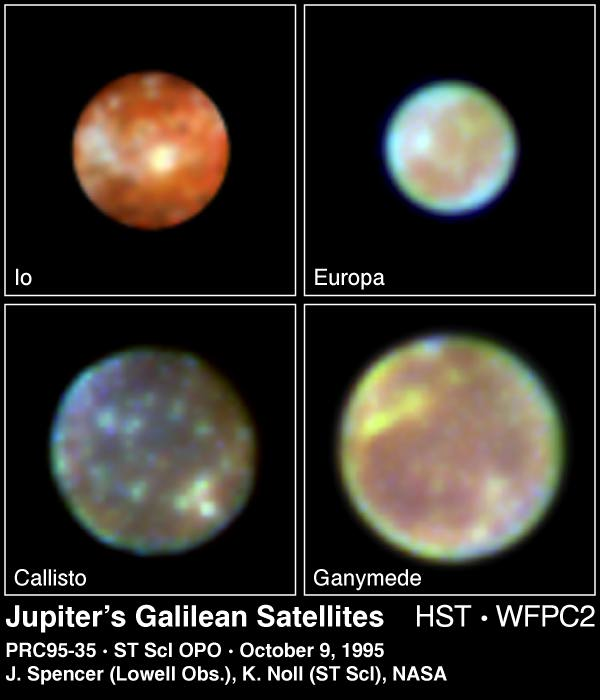

Jupiter's Galilean Satellites

This is a Hubble Space Telescope 'family portrait' of the four largest moons of Jupiter, first observed by the Italian scientist Galileo Galilei nearly four centuries ago.

Located approximately one-half billion miles away (about 805 thousand kilometres), the moons are so small that, in visible light, they appear as fuzzy disks in the largest ground-based telescopes. Hubble can resolve surface details seen previously only by the Voyager spacecraft in the early 1980s.

Credit: K. Noll (STScI), J. Spencer (Lowell Observatory), and NASA/ESA